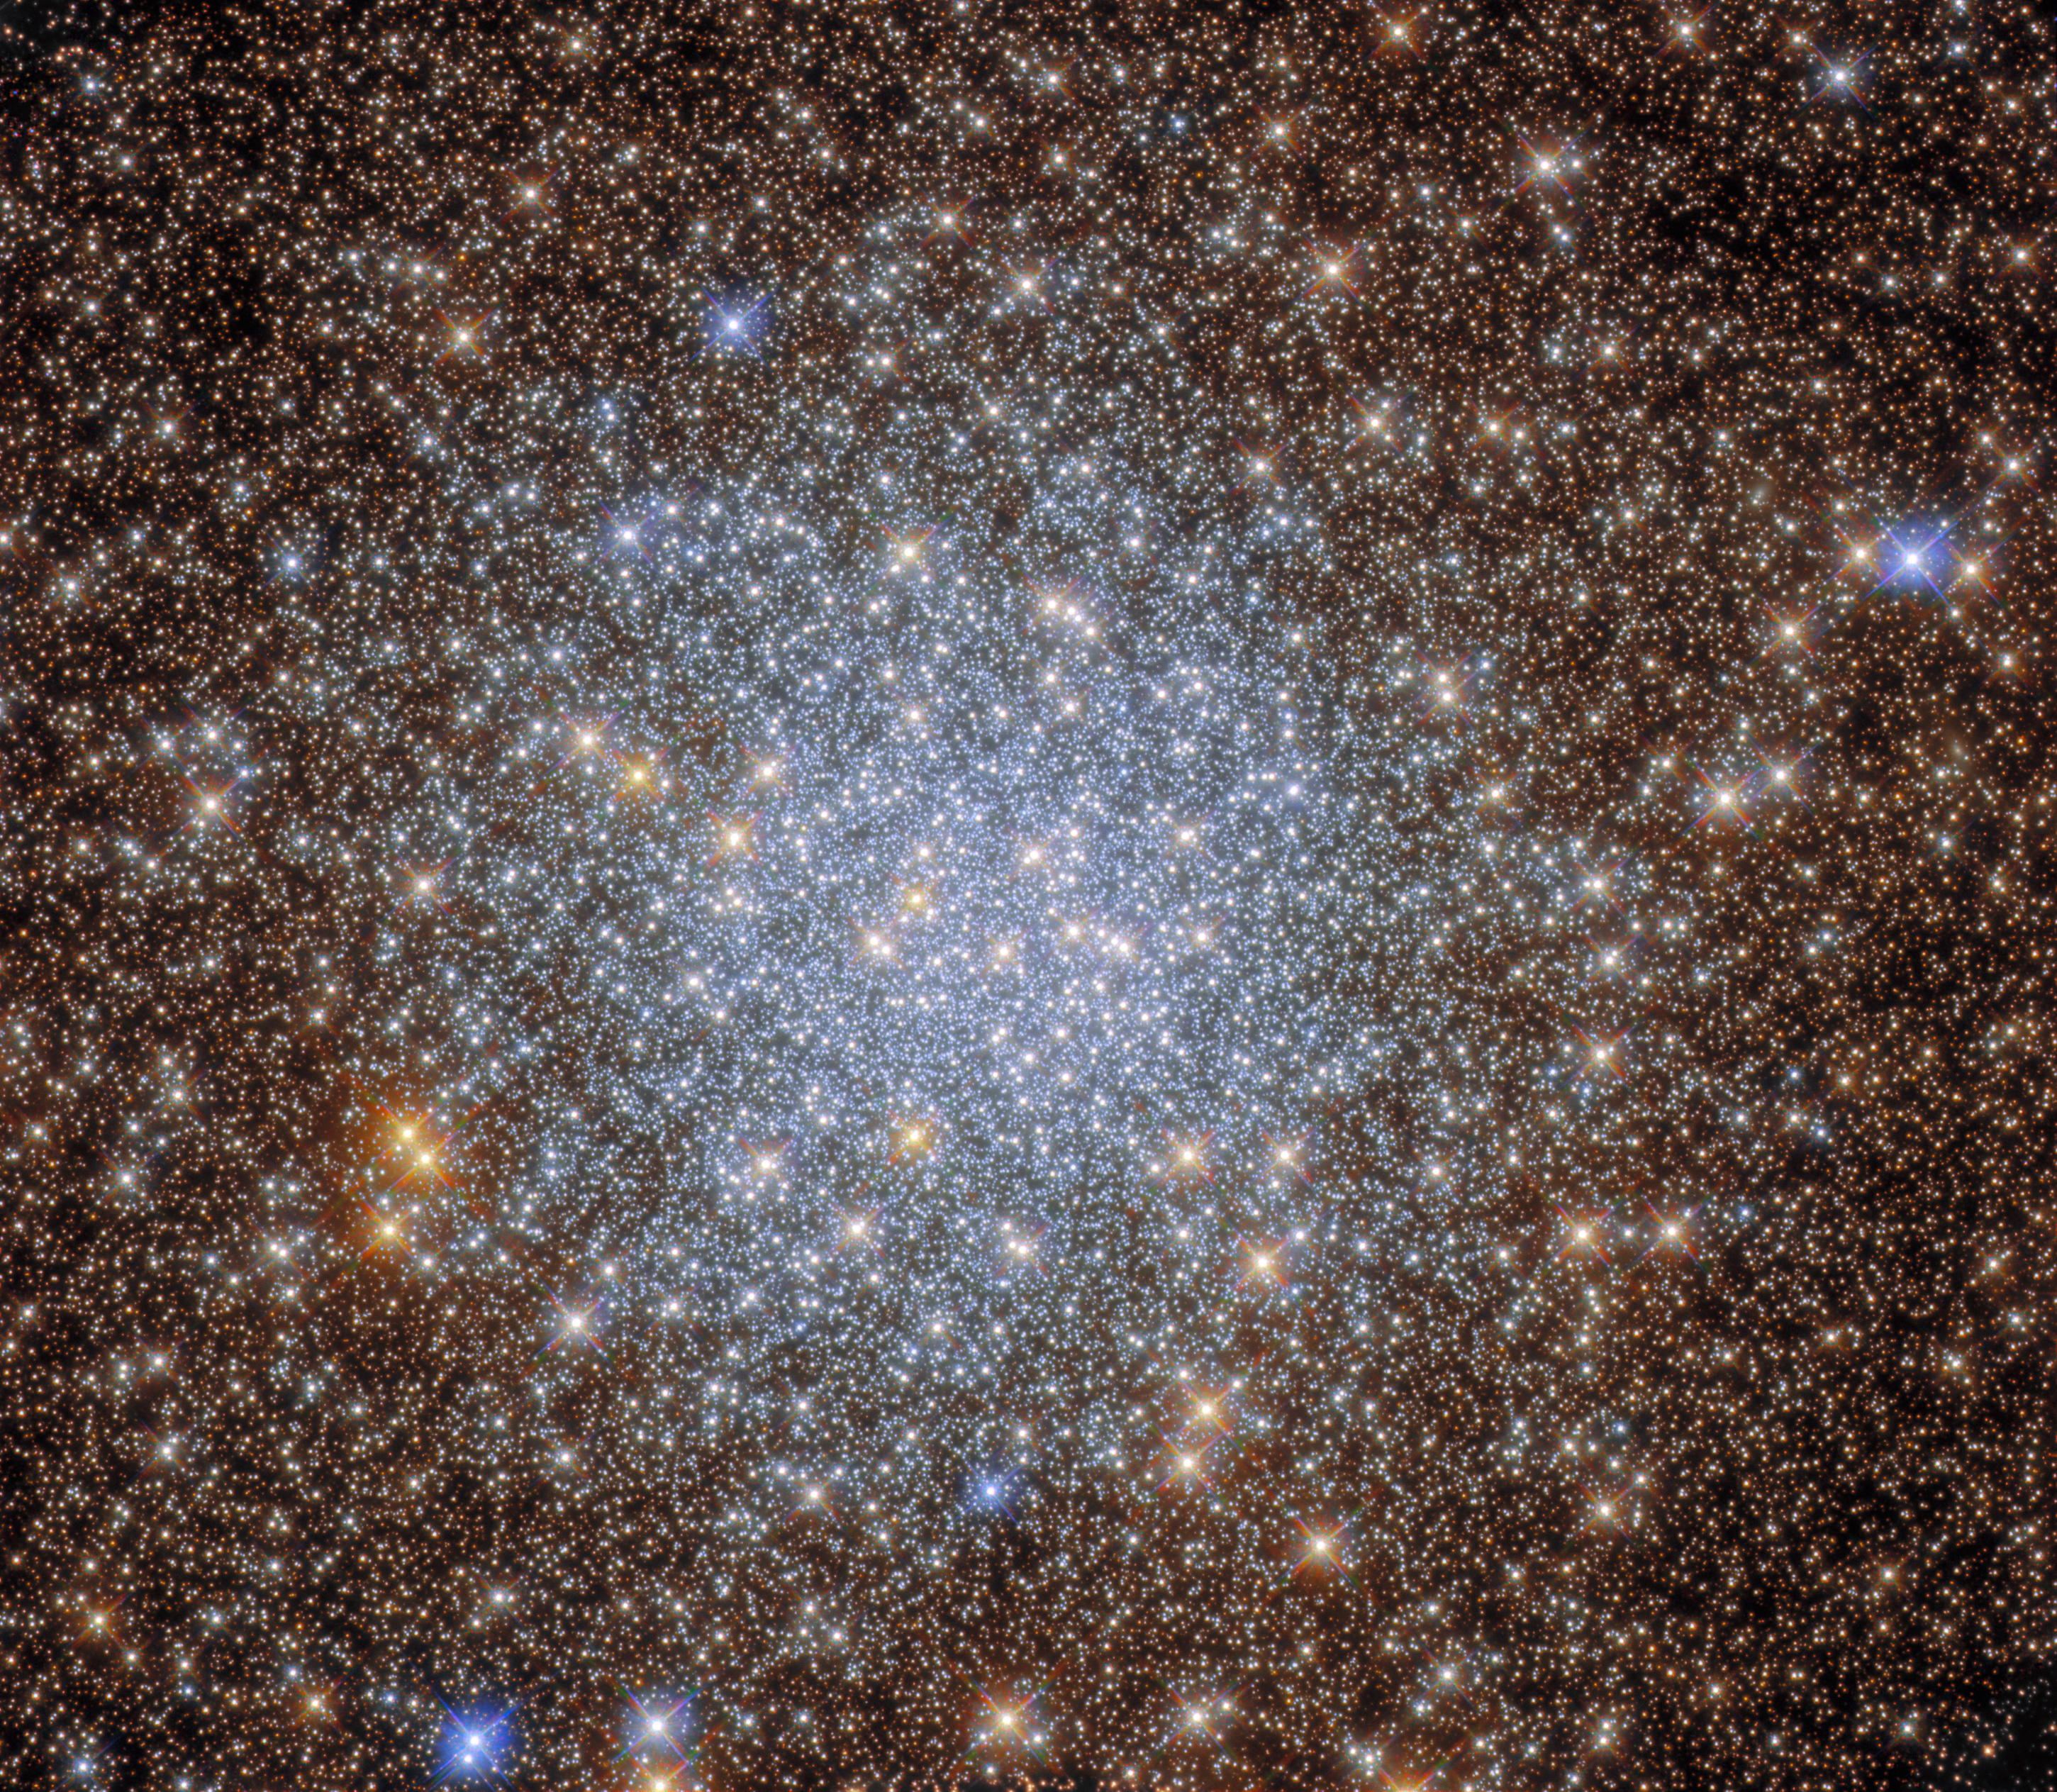

Delving into an Astronomical Treasure Trove

This image from the NASA/ESA Hubble Space Telescope captures the sparkling globular cluster NGC 6569 in the constellation Sagittarius. Hubble explored the heart of this cluster with both its Wide Field Camera 3 and Advanced Camera for Surveys, revealing a glittering hoard of stars in this astronomical treasure trove.

Globular clusters are stable, tightly bound clusters containing tens of thousands to millions of stars, and are associated with all types of galaxies. The intense gravitational attraction of these closely packed clusters of stars means that globular clusters have a regular spherical shape with a densely populated centre — as can be seen in the heart of this star-studded image.

This observation comes from an investigation of globular clusters which lie close to the centre of the Milky Way. These objects have been avoided in previous surveys, as the dust spread throughout the centre of our galaxy blocks light from these globular clusters and alters the colours of the stars residing in them. The last factor is particularly important for astronomers studying stellar evolution, as the colours of stars can give astronomers insights into their ages, compositions, and temperatures.

The astronomers who proposed these observations combined data from Hubble with data from astronomical archives, allowing them to measure the ages of globular clusters including NGC 6569. Their research also provided insights into the structure and density of globular clusters towards the centre of the Milky Way.

Credit: ESA/Hubble & NASA, R. Cohen